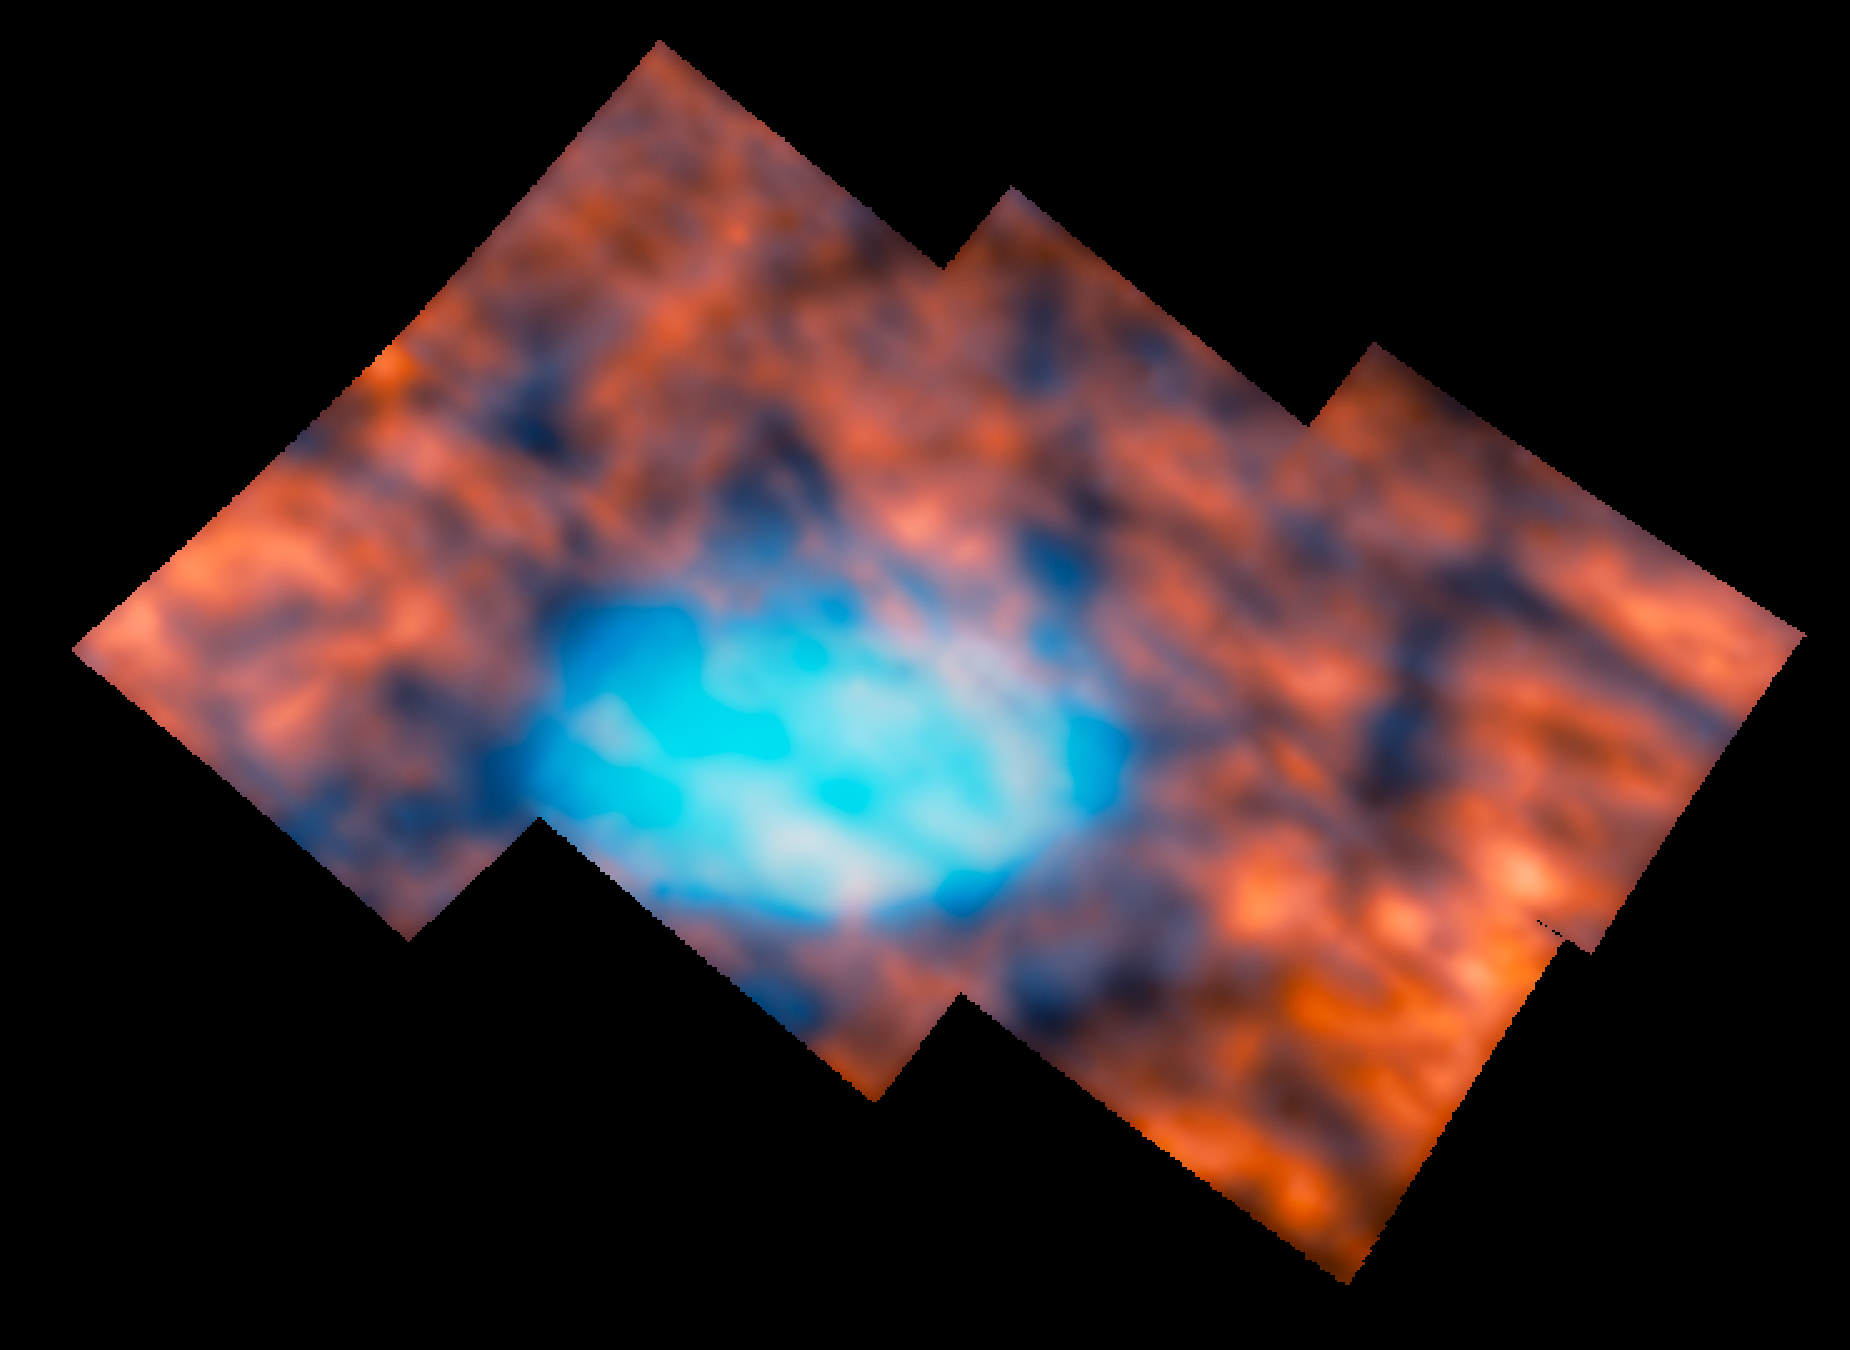

Jupiter’s atmosphere around the Great Red Spot (NIRSpec image)

New observations of the Great Red Spot on Jupiter have revealed that the planet’s atmosphere above and around the infamous storm is surprisingly interesting and active. This image shows the region observed by Webb’s Near-InfraRed Spectrograph (NIRSpec). It is stitched together from six NIRSpec Integral Field Unit images taken in July 2022, each around 300 square kilometres.

The NIRSpec observations show infrared light emitted by hydrogen molecules in Jupiter’s ionosphere. These molecules lie over 300 kilometres above the clouds of the storm, where light from the Sun ionises the hydrogen and stimulates this infrared emission. In this image, redder colours display the hydrogen emission from these high altitudes in the planet’s ionosphere. Bluer colours show infrared light from lower altitudes, including cloud-tops in the atmosphere and the very prominent Great Red Spot.

Jupiter is distant from the Sun and therefore receives a uniform, low level of daylight, meaning that most of the planet’s surface is relatively dim at these infrared wavelengths — especially compared to the emission from molecules near the poles, where Jupiter’s magnetic field is especially strong. Contrary to the researchers’ expectations that this area would therefore look homogeneous in nature, it hosts a variety of intricate structures, including dark arcs and bright spots, across the entire field of view.

Credit: ESA/Webb, NASA & CSA, H. Melin, M. Zamani (ESA/Webb)